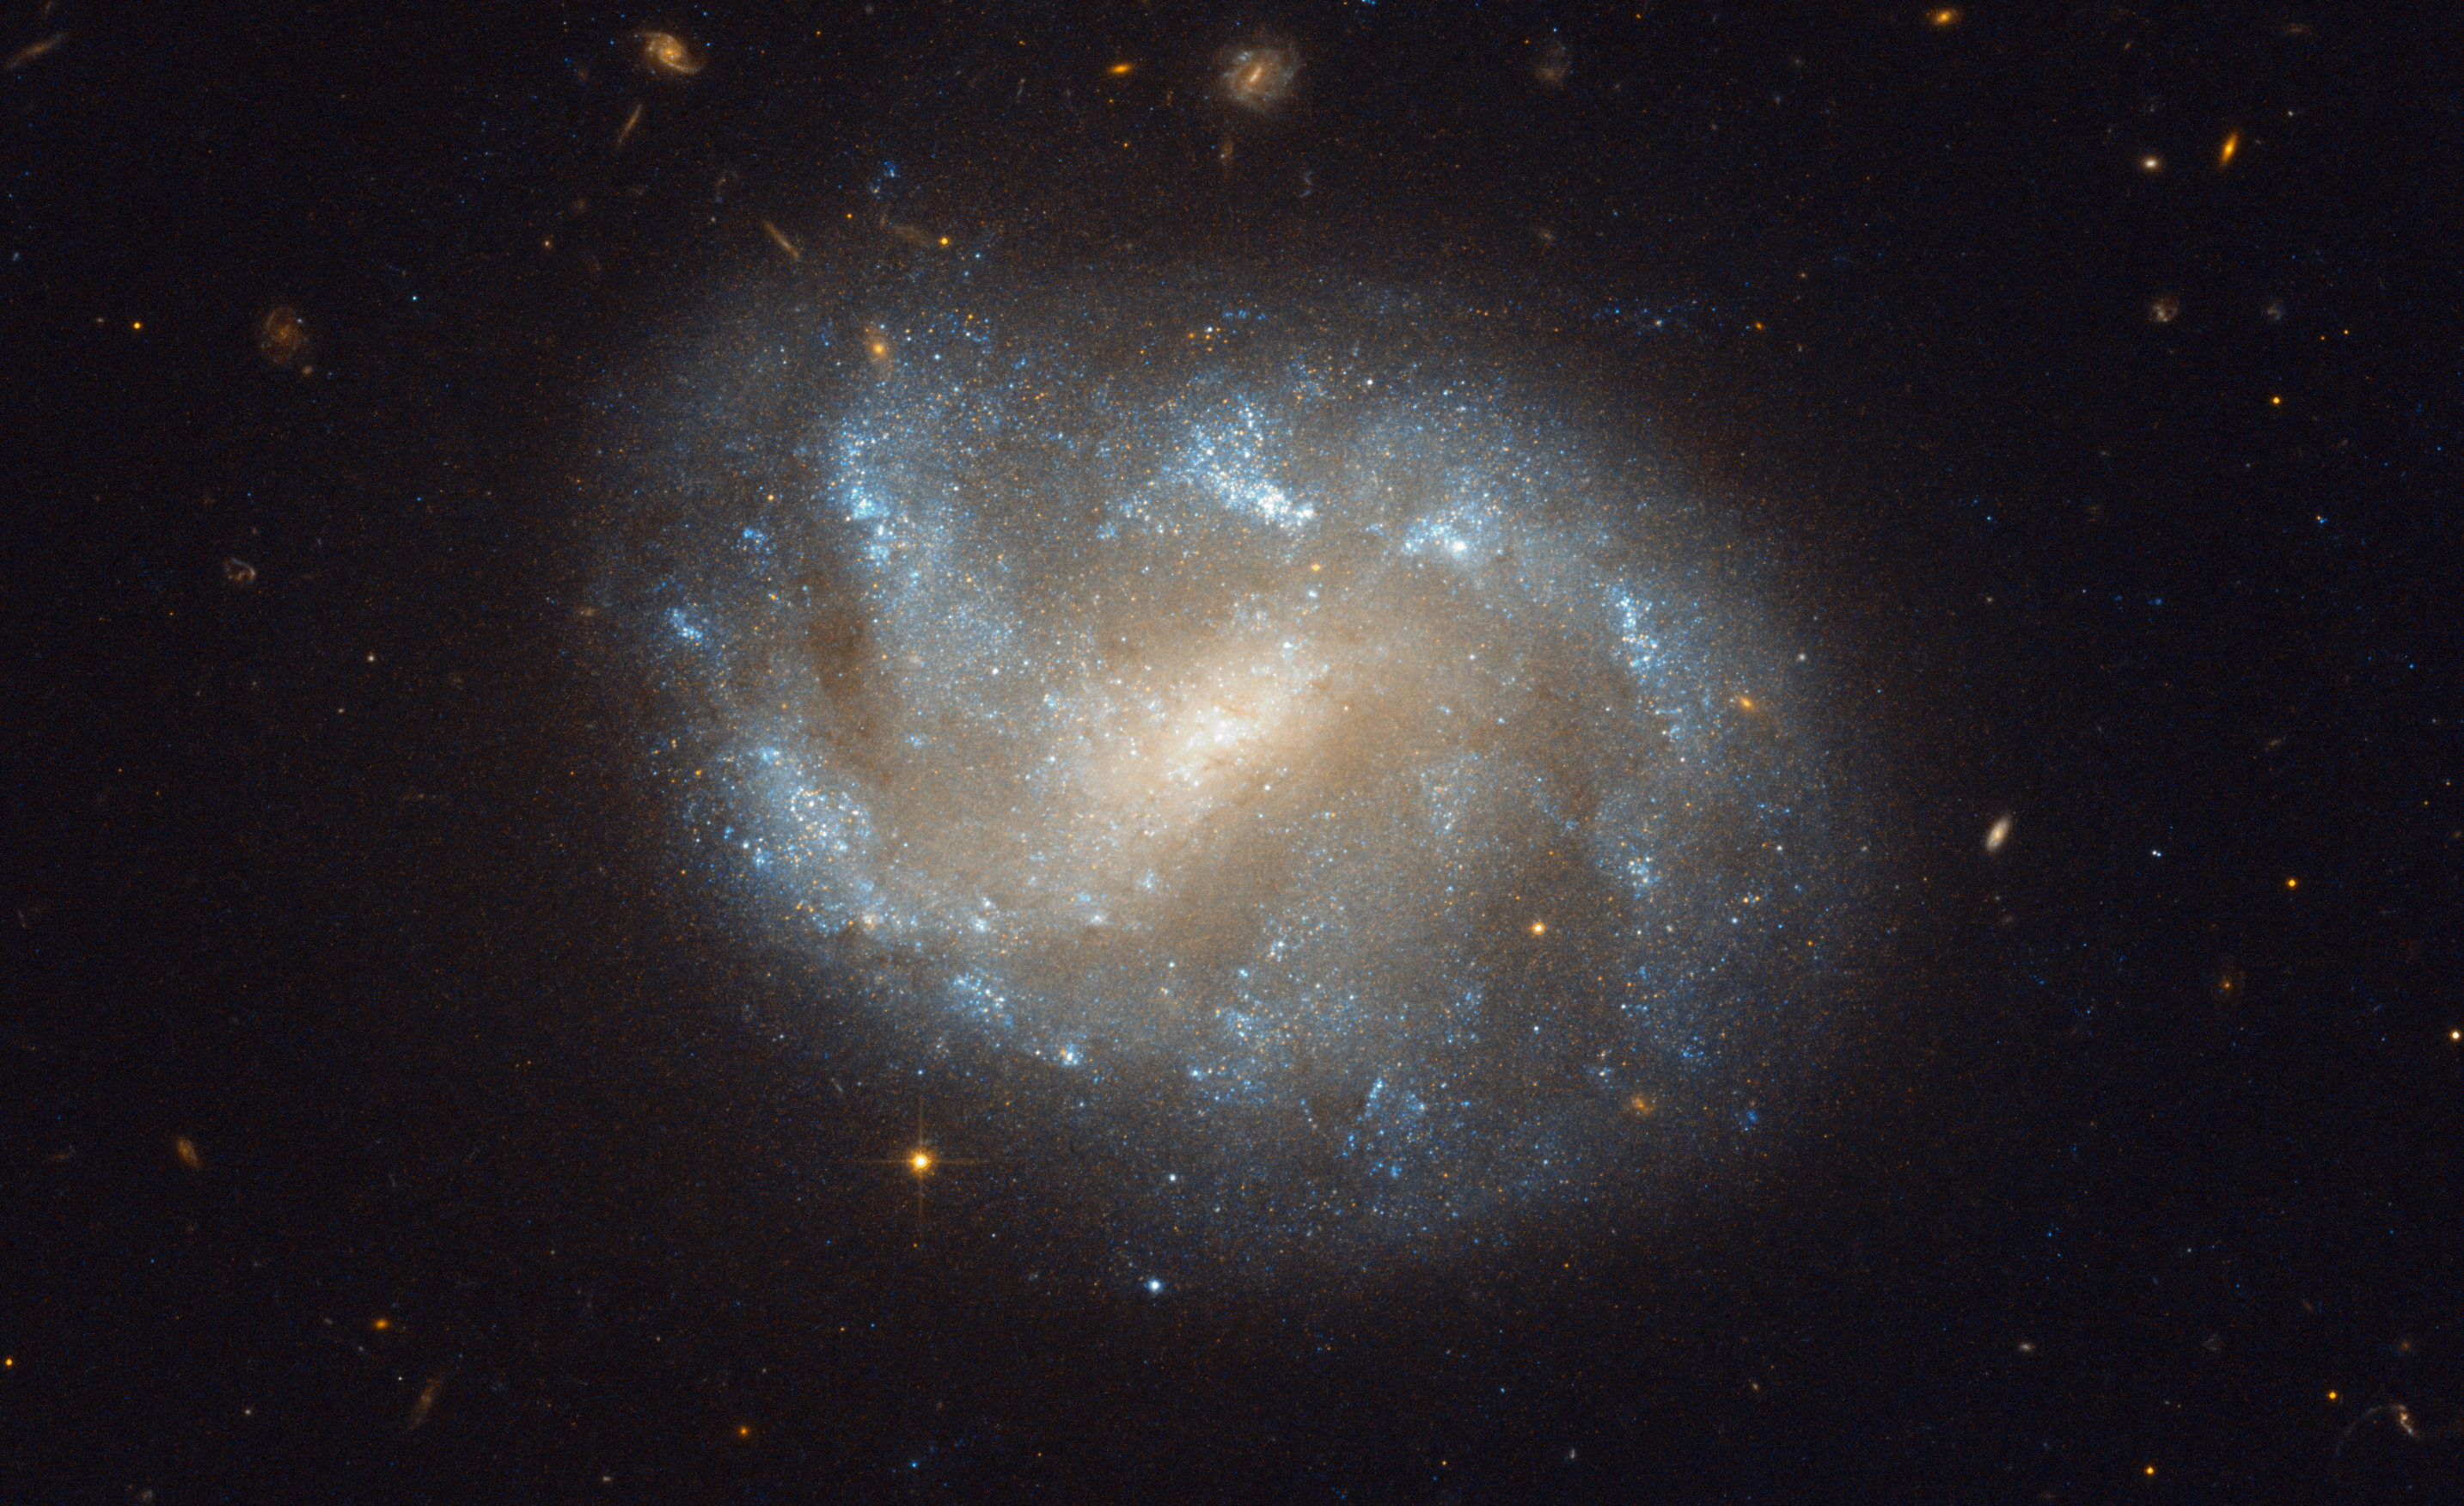

Galaxies' El Dorado

The NASA/ESA Hubble Space Telescope has produced this beautiful image of the galaxy NGC 1483. NGC 1483 is a barred spiral galaxy located in the southern constellation of Dorado — the dolphinfish in Spanish. The nebulous galaxy features a bright central bulge and diffuse arms with distinct star-forming regions. In the background, many other distant galaxies can be seen.

The constellation Dorado is home to the Dorado Group of galaxies, a loose group comprising an estimated 70 galaxies and located some 62 million light-years away. The Dorado group is much larger than the Local Group that includes the Milky Way (and which contains around 30 galaxies) and approaches the size of a galaxy cluster. Galaxy clusters are the largest groupings of galaxies (and indeed the largest structures of any type) in the Universe to be held together by their gravity.

Barred spiral galaxies are so named because of the prominent bar-shaped structures found in their centre. They form about two thirds of all spiral galaxies, including the Milky Way. Recent studies suggest that bars may be a common stage in the formation of spiral galaxies, and may indicate that a galaxy has reached full maturity.

Credit: ESA/Hubble & NASA